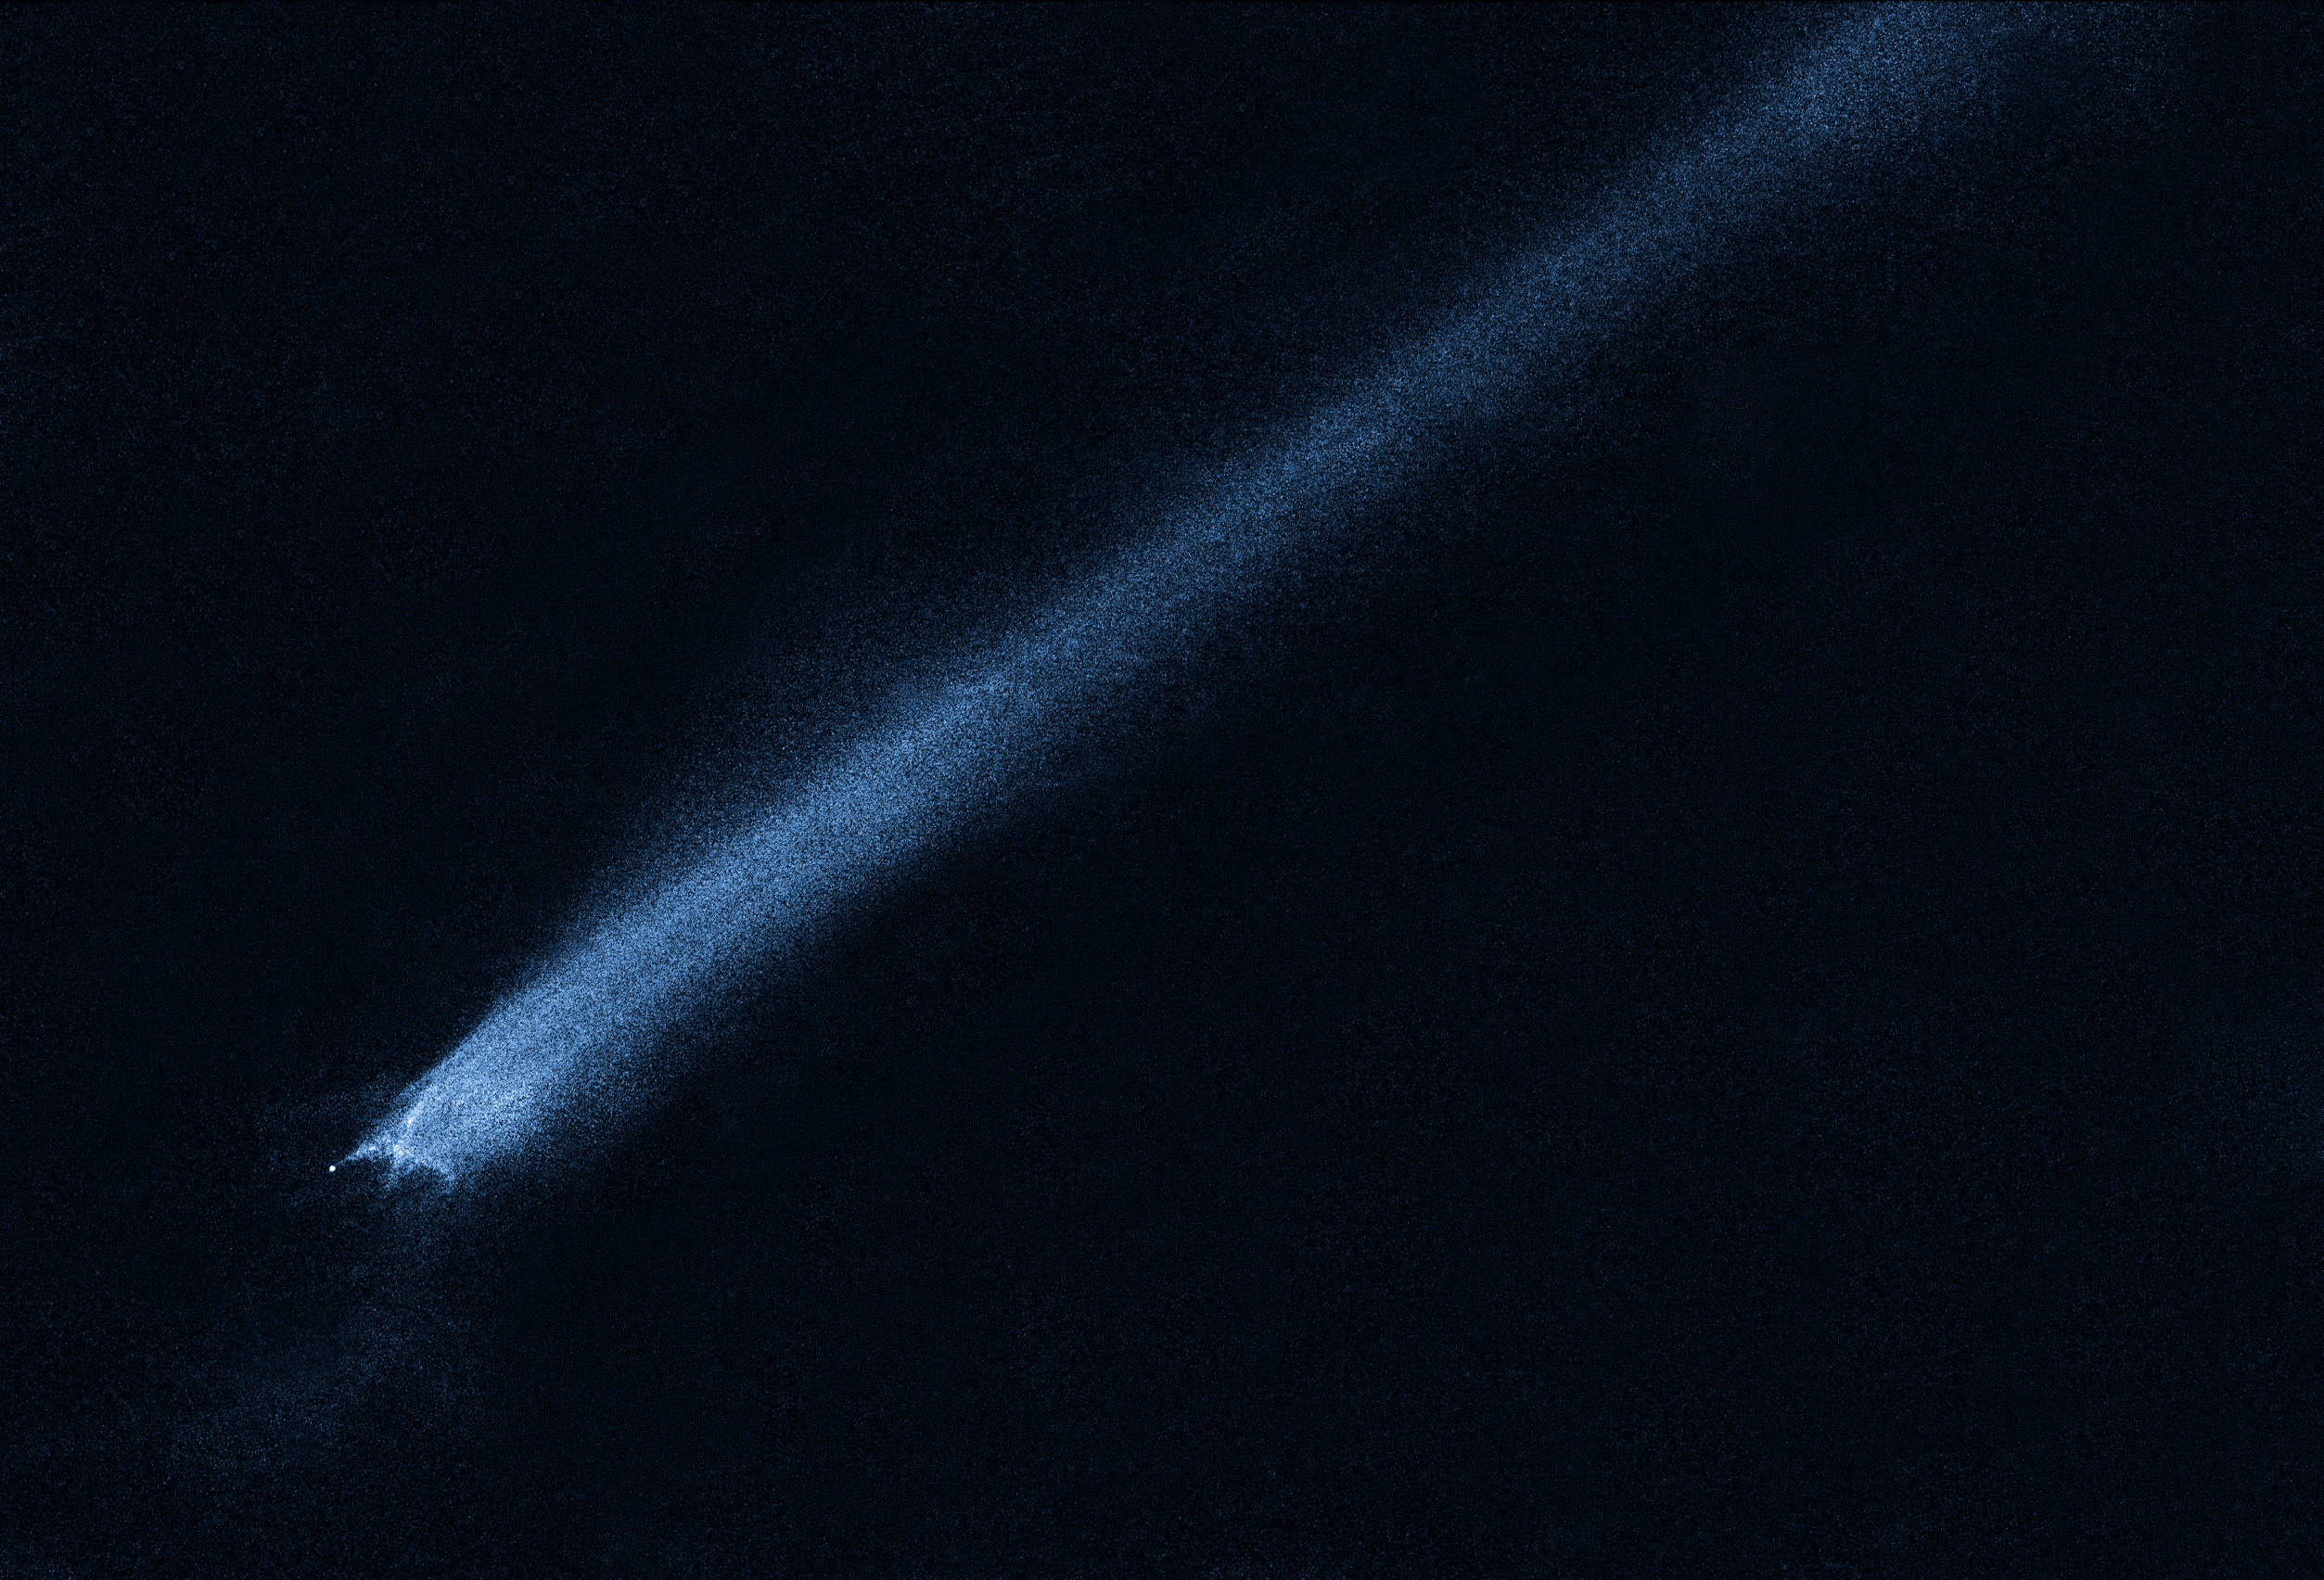

Comet-like asteroid P/2010 A2

The comet-like asteroid P/2010 A2.

Credit: NASA, ESA and D. Jewitt (UCLA)